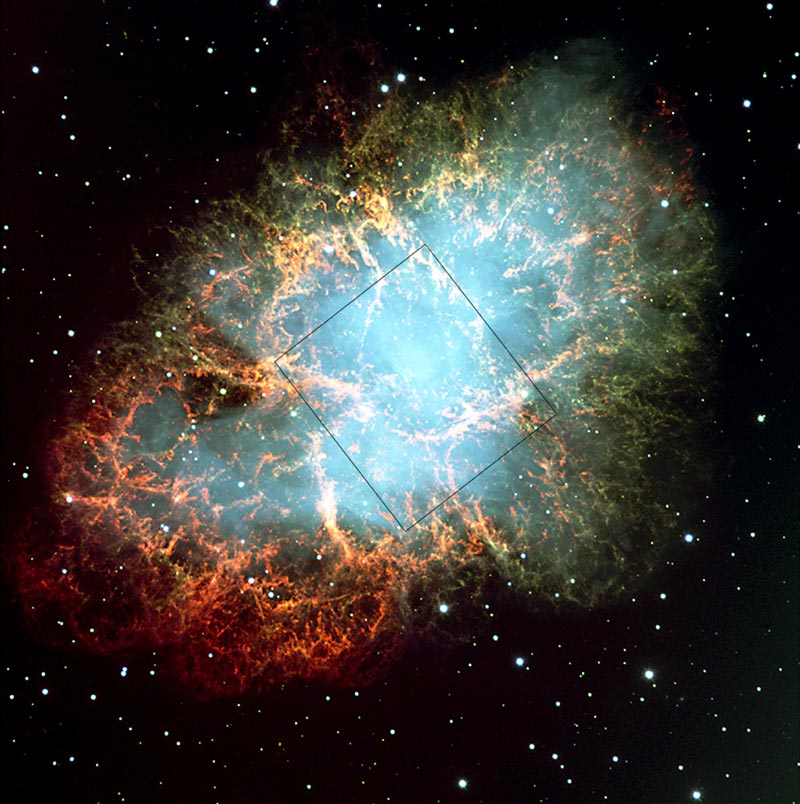

Crab nebula: VLT field, HST image outlined

Located about 6,500 light-years from Earth, the Crab Nebula is the remnant of a star that began its life with about 10 times the mass of our Sun. Its life ended on July 4, 1054 when it exploded as a supernova.

Credit: European Southern Observatory (ESO)